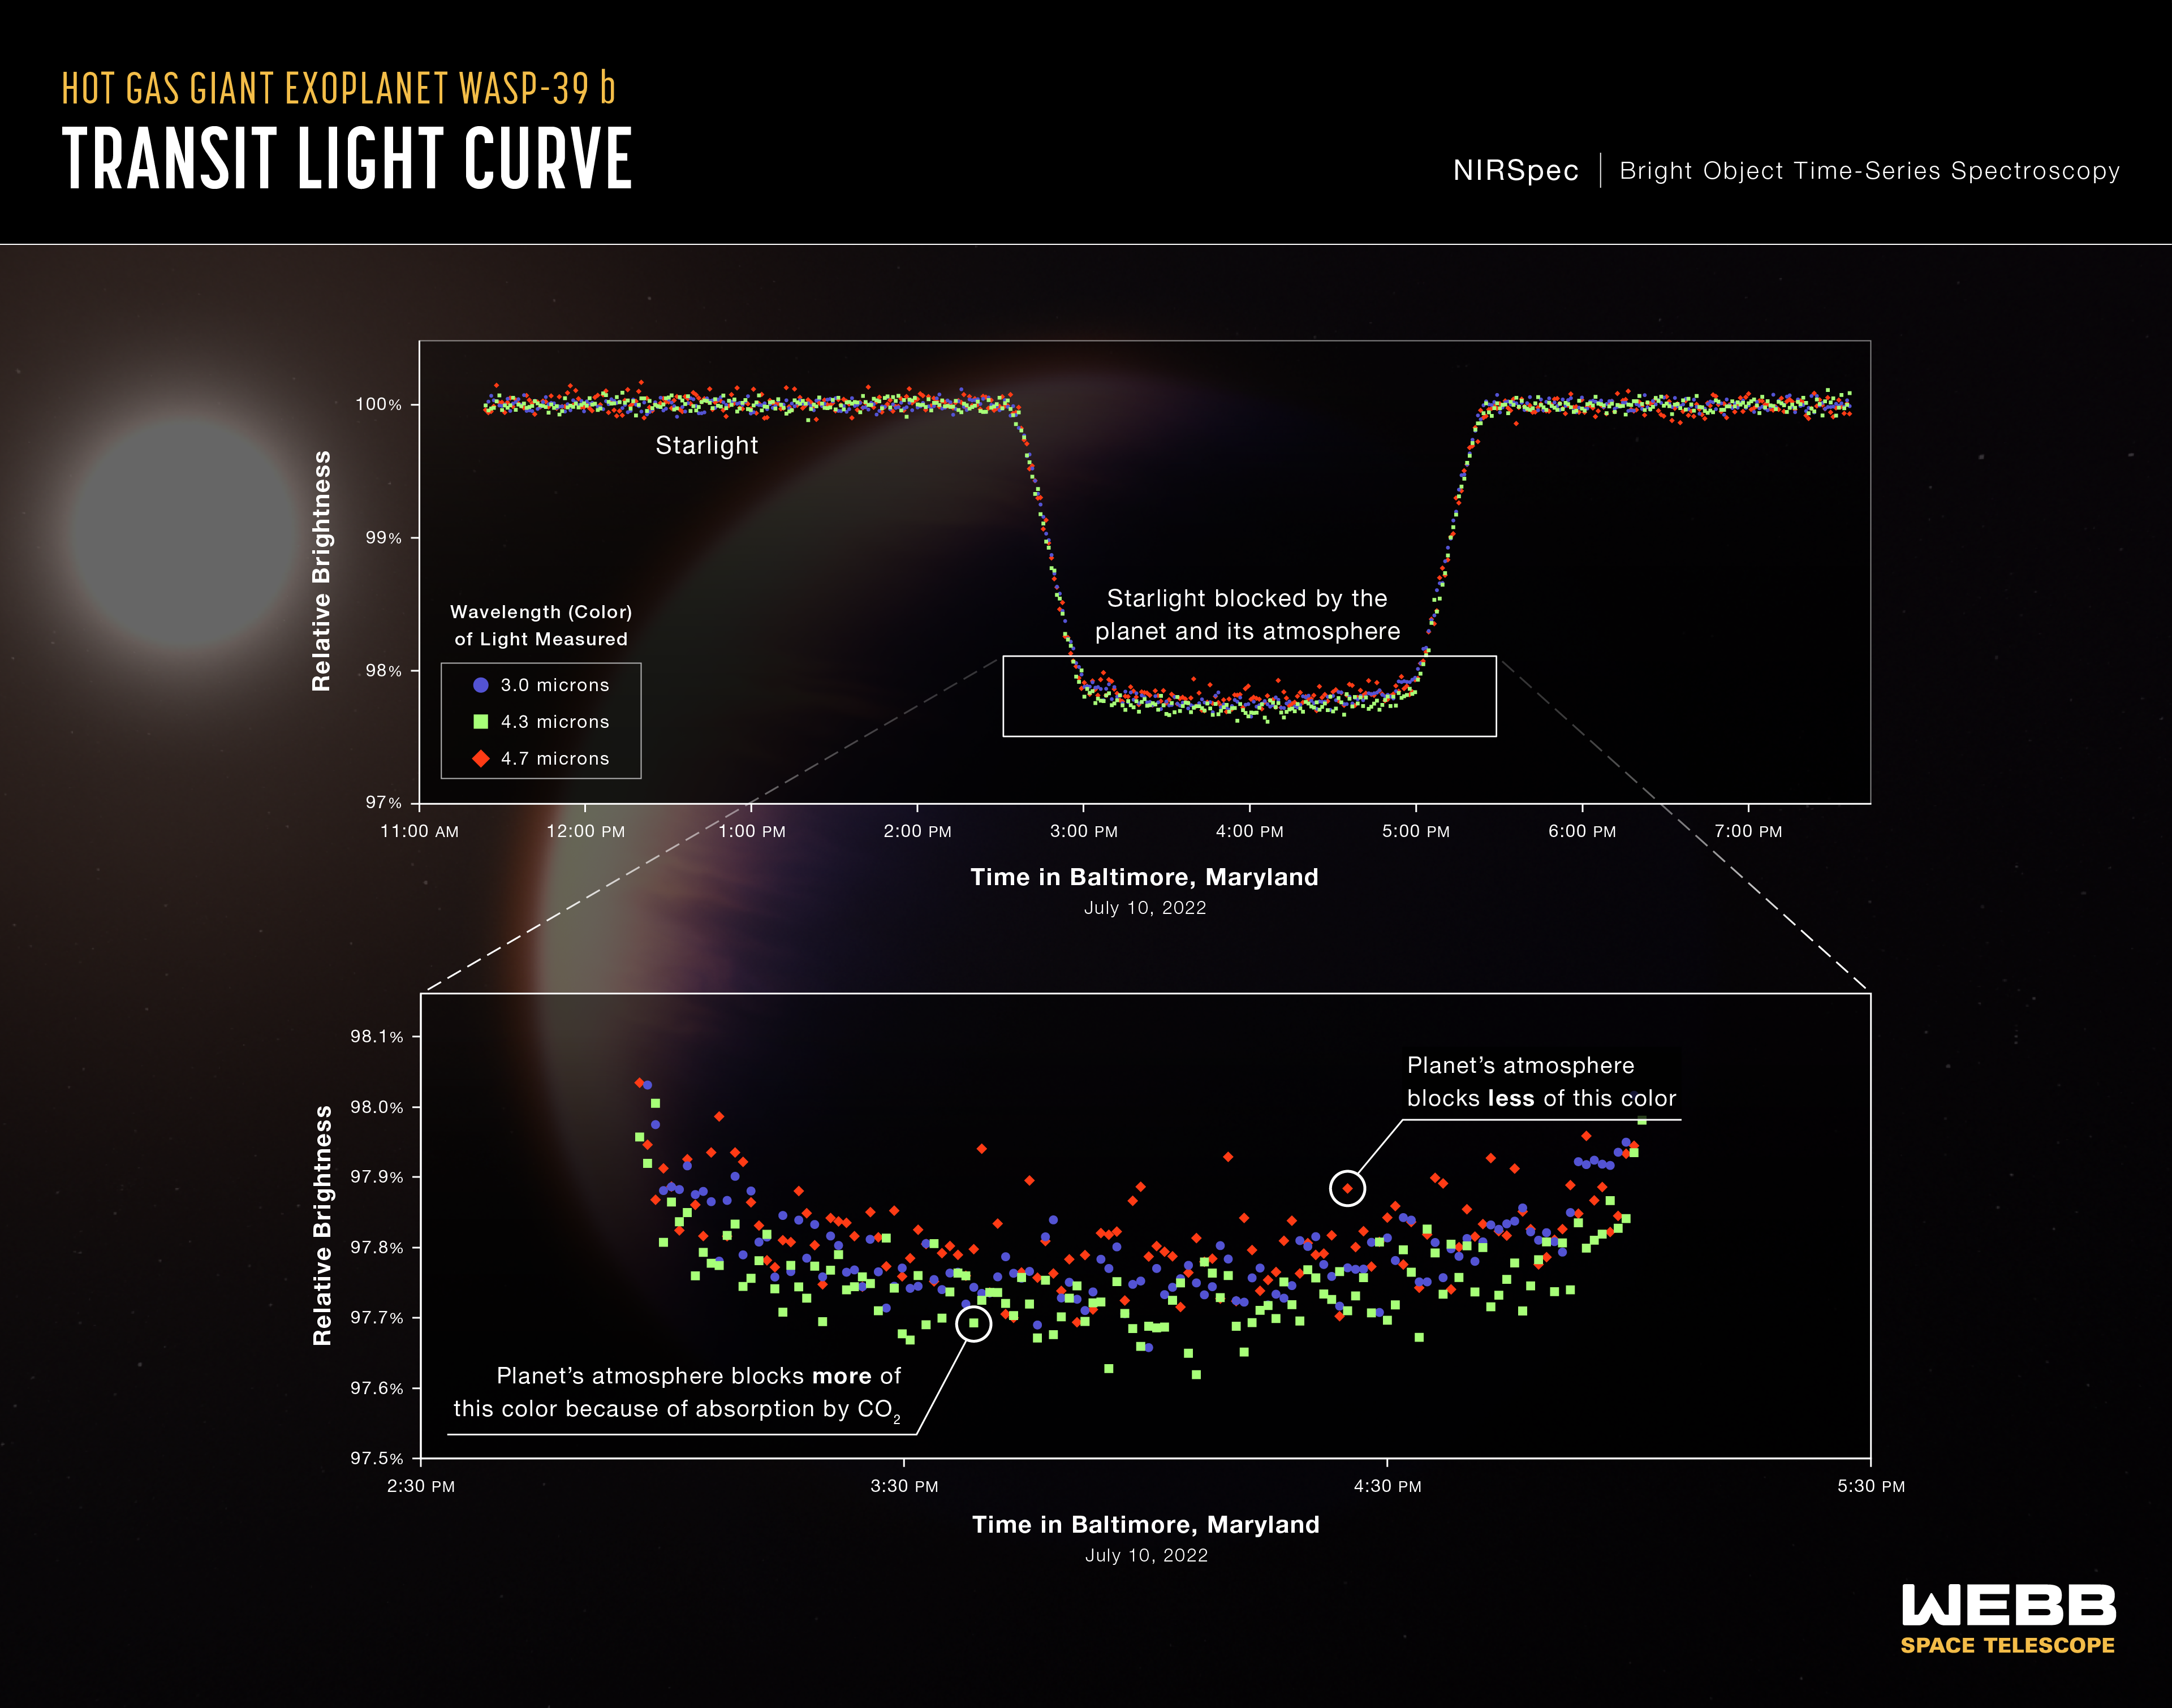

Hot Gas Giant Exoplanet WASP-39 b (NIRSpec Transit Light Curves)

A series of light curves from Webb’s Near-Infrared Spectrograph (NIRSpec) shows the change in brightness of three different wavelengths (colours) of light from the WASP-39 star system over time as the planet transited the star on 10 July 2022. A transit occurs when an orbiting planet moves between the star and the telescope, blocking some of the light from the star.

This observation was made using the NIRSpec PRISM bright object time-series mode, which involves using a prism to spread out light from a single bright object (like the star WASP-39) and measure the brightness of each wavelength at set intervals of time.

To capture this data, Webb stared at the WASP-39 star system for more than eight hours, beginning about three hours before the transit and ending about two hours after the transit was complete. The transit itself lasted about three hours. Each curve shown here includes a total of 500 individual brightness measurements — about one per minute.

Although all colours are blocked to some extent by the planet, some are blocked more than others. This occurs because different gases in the atmosphere absorb different amounts at different wavelengths. As a result, each colour has a slightly different light curve. During the transit of WASP-39 b, light with a wavelength of 4.3 microns is not as bright as 3.0-micron or 4.7-micron light because it is absorbed by carbon dioxide.

WASP-39 b is a hot gas giant exoplanet that orbits a Sun-like star roughly 700 light-years away, in the constellation Virgo. The planet orbits extremely close to its star (less than 1/20 of the distance between Earth and the Sun) and completes one orbit in just over four Earth-days. The planet’s discovery, from ground-based observations, was announced in 2011.

The background illustration of WASP-39 b and its star is based on current understanding of the planet from Webb spectroscopy and previous ground- and space-based observations. Webb has not captured a direct image of the planet or its atmosphere.

NIRSpec was built for the European Space Agency (ESA) by a consortium of European companies led by Airbus Defence and Space (ADS) with NASA’s Goddard Space Flight Centre providing its detector and micro-shutter subsystems.

Credit: NASA, ESA, CSA, and L. Hustak (STScI). Science: The JWST Transiting Exoplanet Community Early Release Science Team